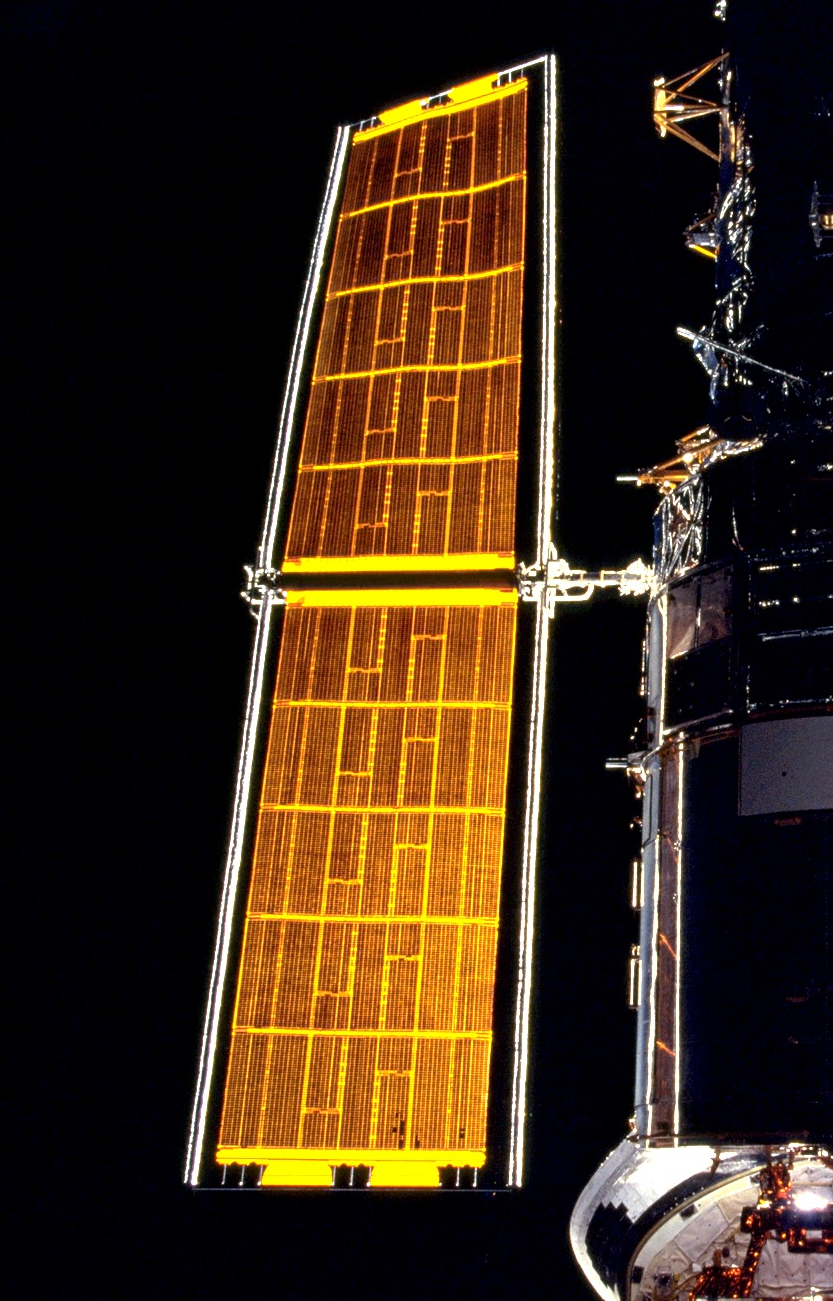

Solar Array

A close-up image of one of Hubbles solar arrays.

Credit: NASA/ESA